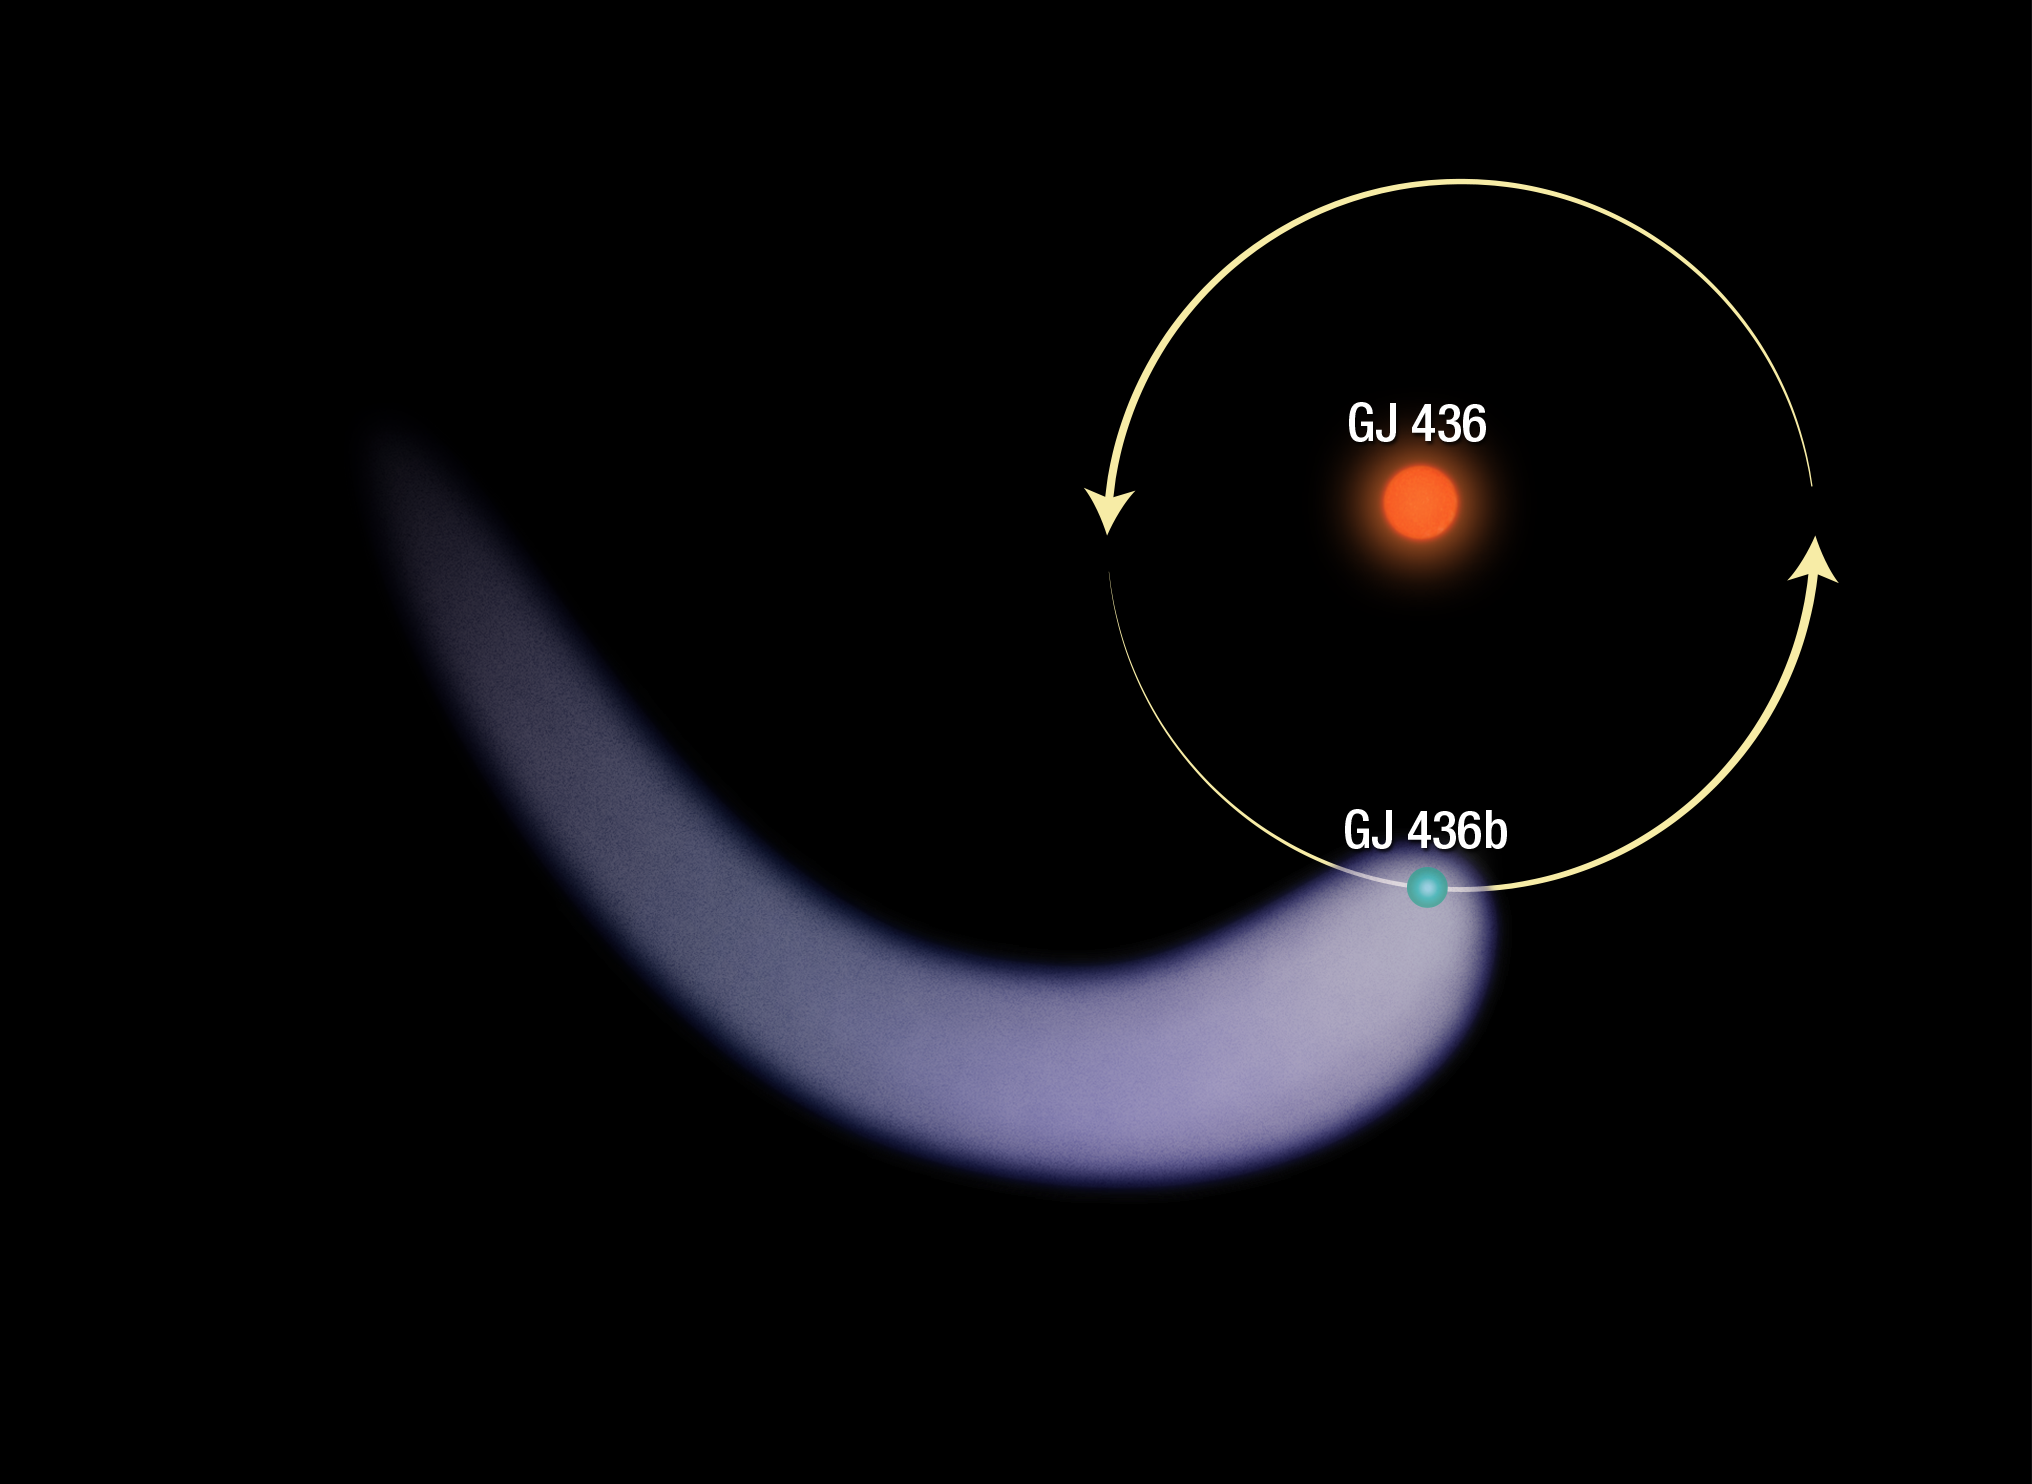

Orbit of Gliese 436b around its host star

The graphic shows the polar view of planet Gliese 436b around its host star. The long, comet-like tail resulting from the atmosphere getting ripped off it is shown as well. The exoplanet resides about 4 million kilometres from its star and orbits it in just 2.6 Earth days.

Credit: NASA, ESA